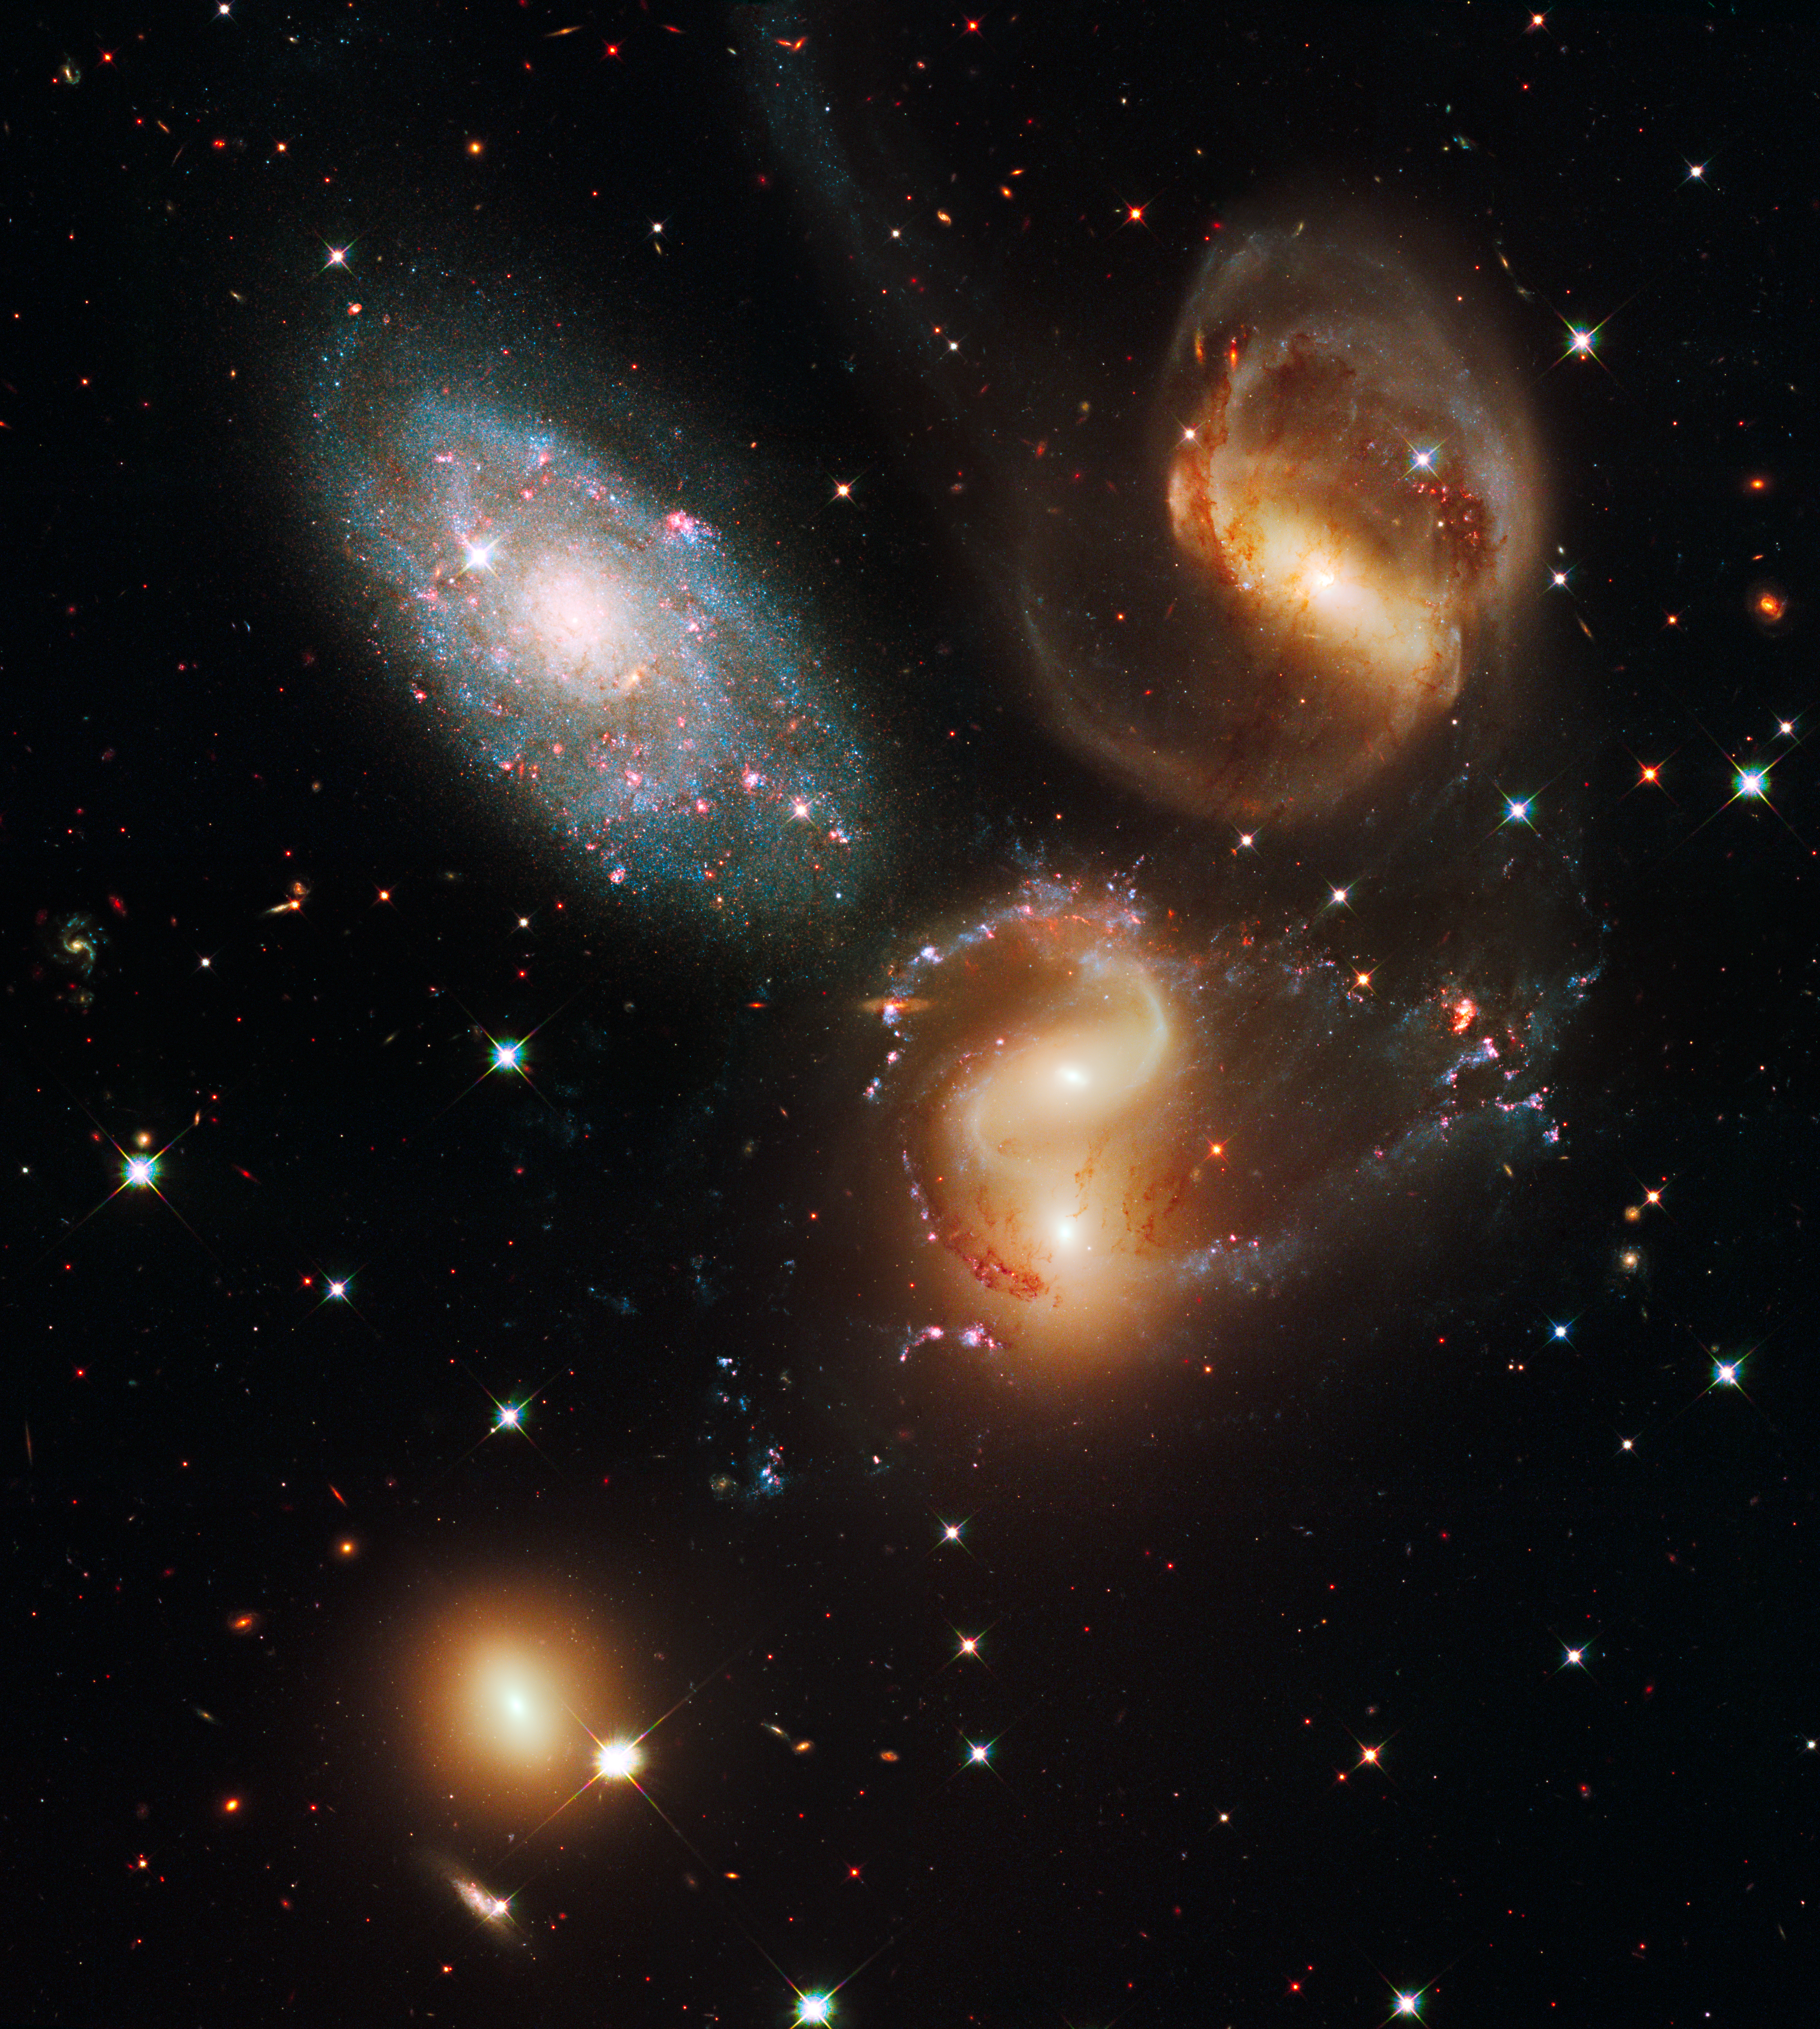

Galactic wreckage in Stephan's Quintet

A clash among members of a famous galaxy quintet reveals an assortment of stars across a wide colour range, from young, blue stars to aging, red stars.

This portrait of Stephan's Quintet, also known as the Hickson Compact Group 92, was taken by the new Wide Field Camera 3 (WFC3) aboard the NASA/ESA Hubble Space Telescope. Stephan's Quintet, as the name implies, is a group of five galaxies. The name, however, is a bit of a misnomer. Studies have shown that group member NGC 7320, at upper left, is actually a foreground galaxy that is about seven times closer to Earth than the rest of the group.

Three of the galaxies have distorted shapes, elongated spiral arms, and long, gaseous tidal tails containing myriad star clusters, proof of their close encounters. These interactions have sparked a frenzy of star birth in the central pair of galaxies. This drama is being played out against a rich backdrop of faraway galaxies.

The image, taken in visible and near-infrared light, showcases WFC3's broad wavelength range. The colours trace the ages of the stellar populations, showing that star birth occurred at different epochs, stretching over hundreds of millions of years. The camera's infrared vision also peers through curtains of dust to see groupings of stars that cannot be seen in visible light.

NGC 7319, at top right, is a barred spiral with distinct spiral arms that follow nearly 180 degrees back to the bar. The blue specks in the spiral arm at the top of NGC 7319 and the red dots just above and to the right of the core are clusters of many thousands of stars. Most of the Quintet is too far away even for Hubble to resolve individual stars.

Continuing clockwise, the next galaxy appears to have two cores, but it is actually two galaxies, NGC 7318A and NGC 7318B. Encircling the galaxies are young, bright blue star clusters and pinkish clouds of glowing hydrogen where infant stars are being born. These stars are less than 10 million years old and have not yet blown away their natal cloud. Far away from the galaxies, at right, is a patch of intergalactic space where many star clusters are forming.

NGC 7317, at bottom left, is a normal-looking elliptical galaxy that is less affected by the interactions.

Sharply contrasting with these galaxies is the dwarf galaxy NGC 7320 at upper left. Bursts of star formation are occurring in the galaxy's disc, as seen by the blue and pink dots. In this galaxy, Hubble can resolve individual stars, evidence that NGC 7320 is closer to Earth. NGC 7320 is 40 million light-years from Earth. The other members of the Quintet reside about 300 million light-years away in the constellation Pegasus.

These more distant members are markedly redder than the foreground galaxy, suggesting that older stars reside in their cores. The stars' light also may be further reddened by dust stirred up in the encounters.

Spied by Edouard M. Stephan in 1877, Stephan's Quintet is the first compact group ever discovered.

WFC3 observed the Quintet in July and August 2009. The composite image was made by using filters that isolate light from the blue, green and infrared portions of the spectrum, as well as emission from ionised hydrogen.

These Hubble observations are part of the Hubble Servicing Mission 4 Early Release Observations. NASA astronauts installed the WFC3 camera during a servicing mission in May to upgrade and repair the 19-year-old Hubble telescope.

Credit: NASA, ESA and the Hubble SM4 ERO Team